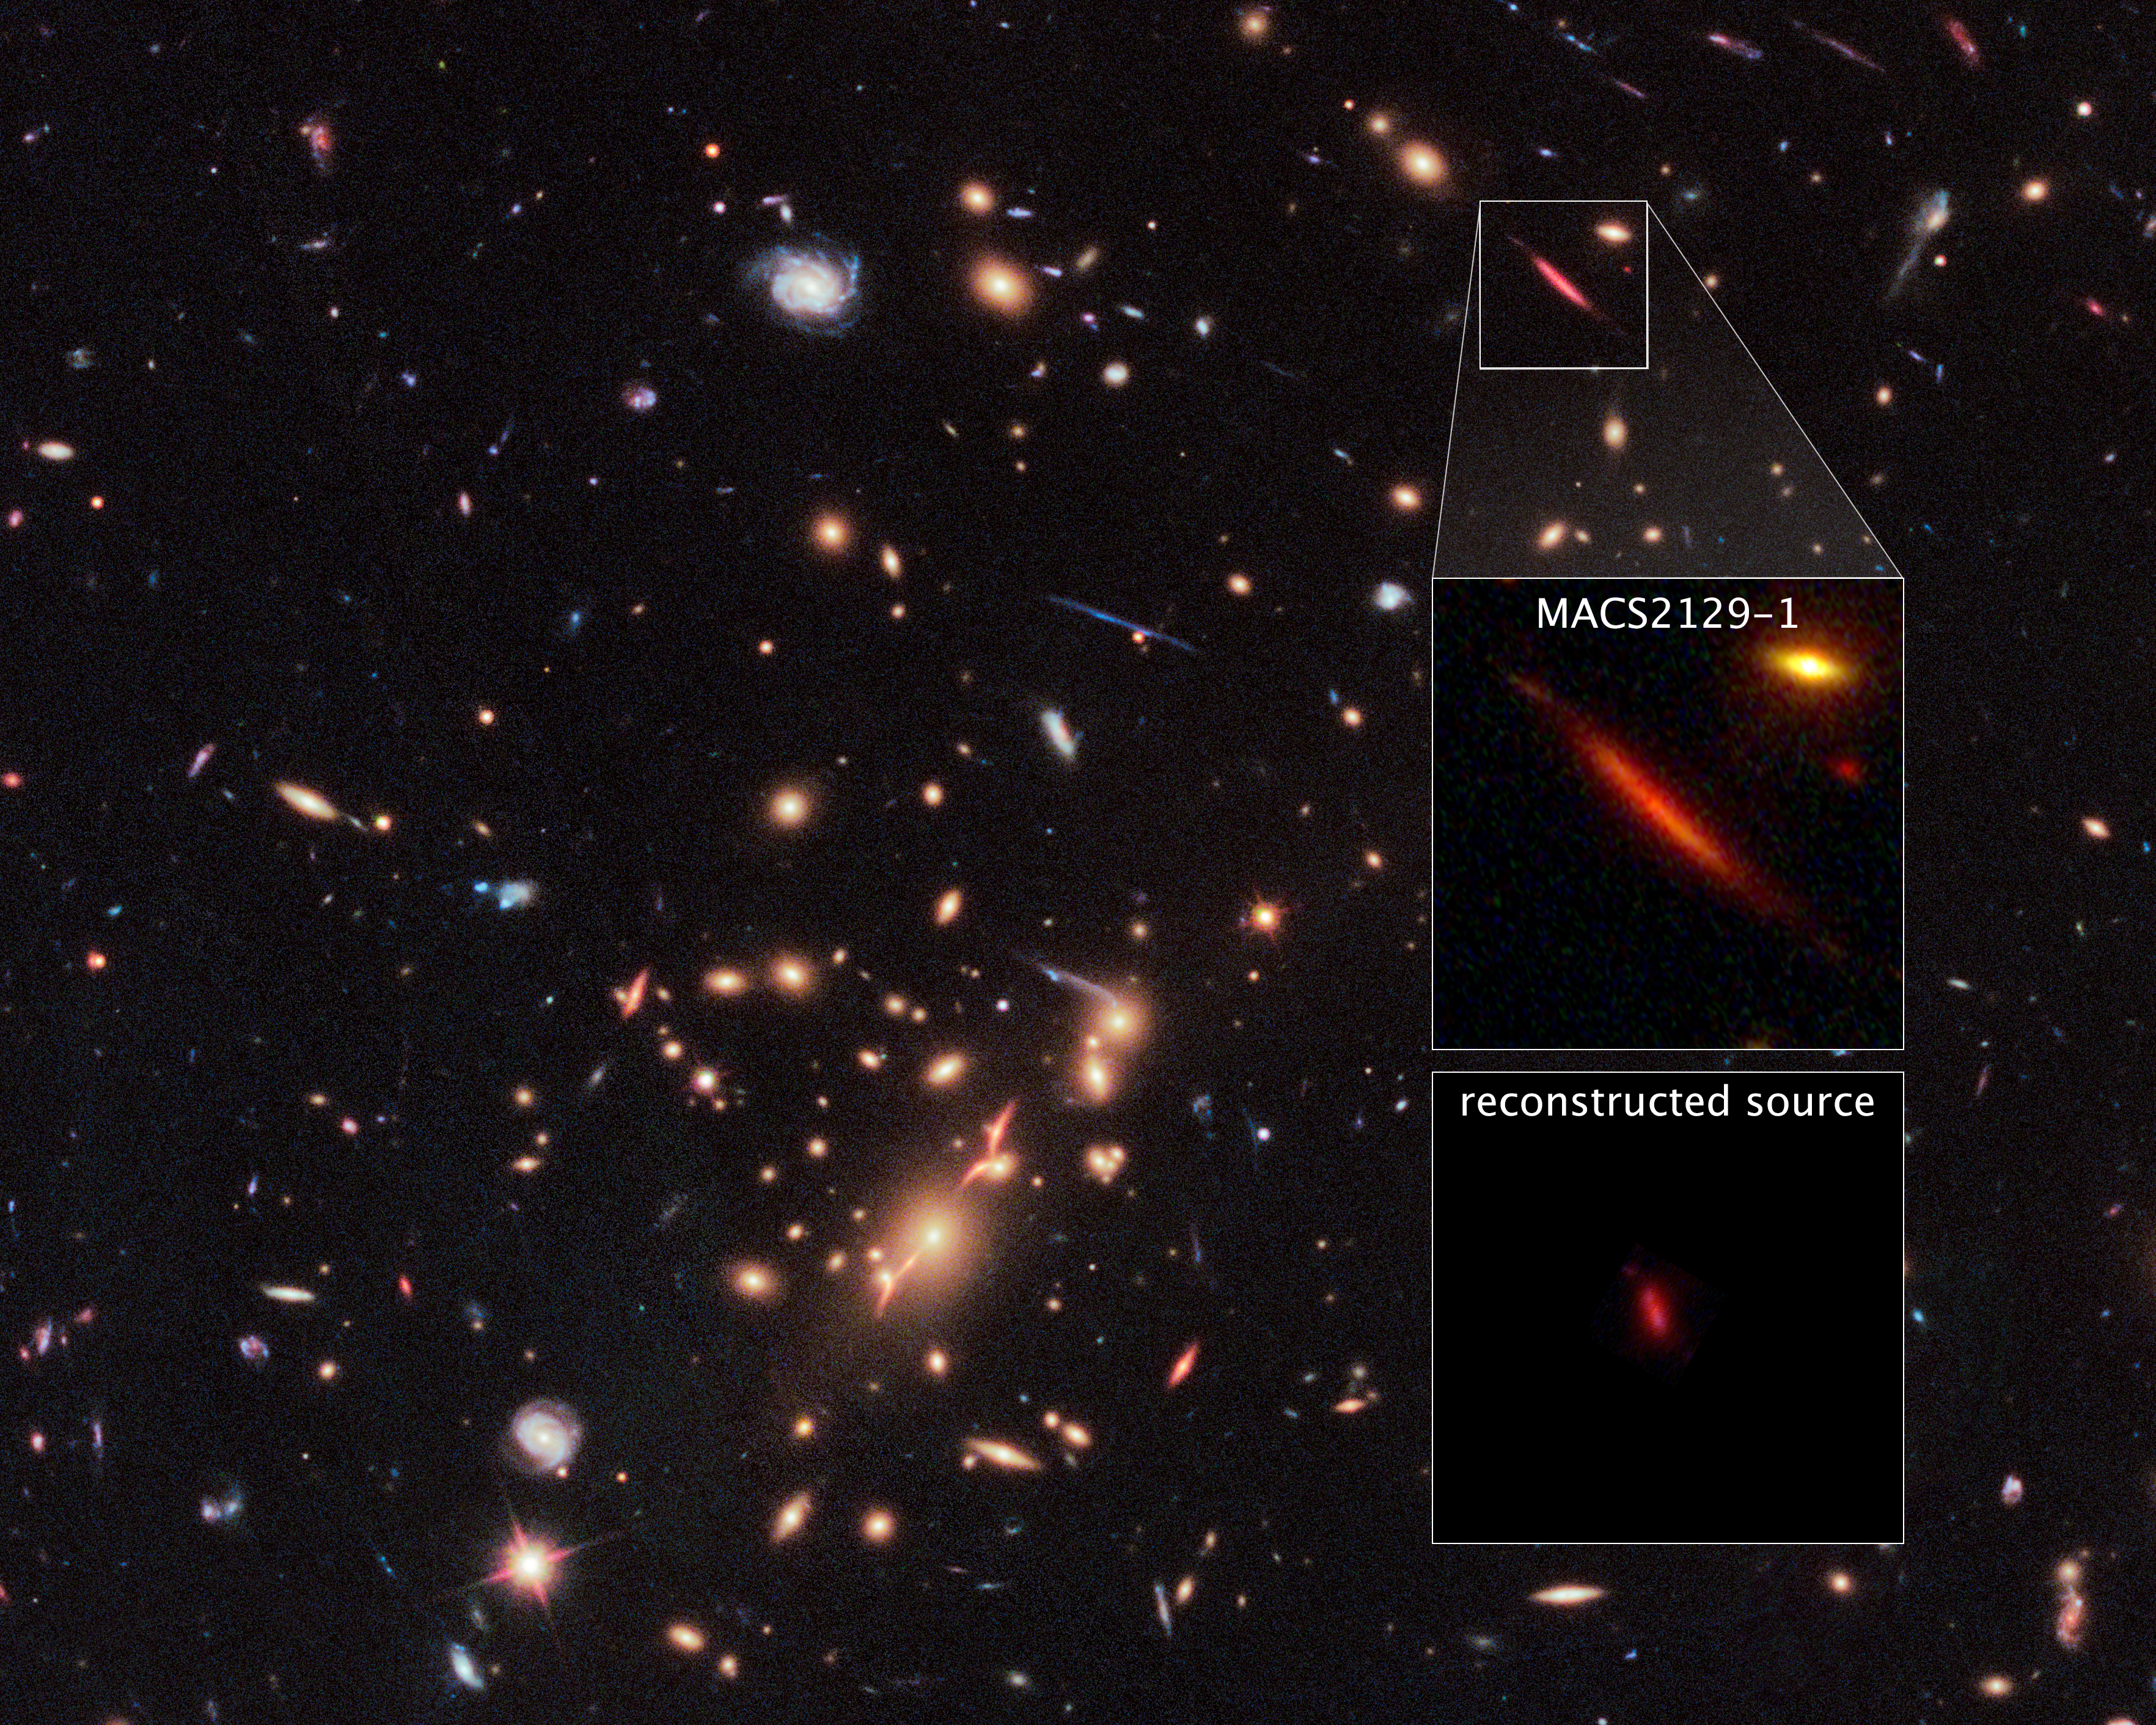

Galaxy cluster MACS J2129-0741 and lensed galaxy MACS2129-1

Acting as a natural telescope in space, the gravity of the extremely massive foreground galaxy cluster MACS J2129-0741 magnifies, brightens, and distorts the far-distant background galaxy MACS2129-1, shown in the top box.

The middle box is a blown-up view of the gravitationally lensed galaxy. The bottom box displays a reconstructed image, based on modeling, that shows what the galaxy would look like if the galaxy cluster were not present. The galaxy appears red because it is so distant that its light is shifted into the red part of the spectrum.

Credit: NASA, ESA, STScI, and Sune Toft (Dark Cosmology Centre at the Niels Bohr Inst., Univ. of Copenhagen)